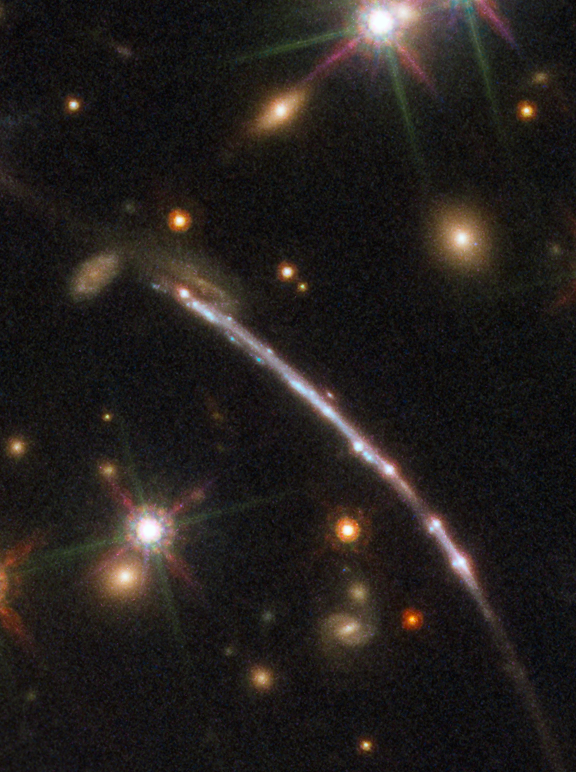

Sunburst Arc 2

This image, taken with the NASA/ESA Hubble Space Telescope, shows one of four arcs formed of the light from the galaxy nicknamed the Sunburst Arc. Created by strong gravitational lensing, this bright arc of light consists of at least four copies of the image of a single galaxy. The lensed galaxy is about 11 billion light-years away.

Credit: ESA/Hubble, NASA, Rivera-Thorsen et al.